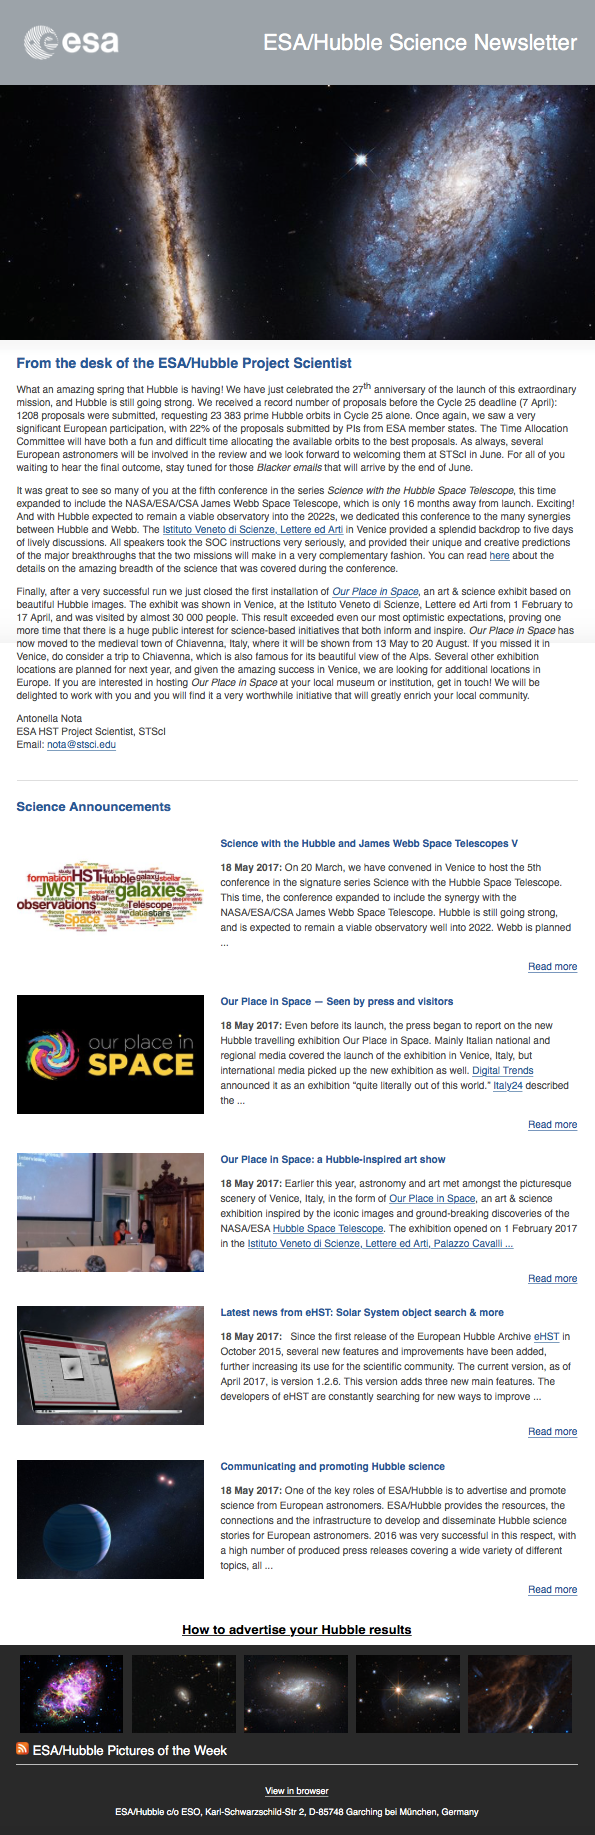

Screenshot of the May 2017 issue of ESA/Hubble Science Newsletter

Screenshot of the May 2017 issue of ESA/Hubble Science Newsletter.

Credit: ESO